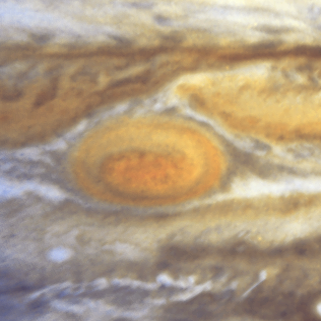

Jupiter's Great Red Spot

When 17th-century astronomers first turned their telescopes to Jupiter, they noted a conspicuous reddish spot on the giant planet. This Great Red Spot is still present in Jupiter's atmosphere, more than 300 years later. It is now known that it is a vast storm, spinning like a cyclone. Unlike a low-pressure hurricane in the Caribbean Sea, however, the Red Spot rotates in a counterclockwise direction in the southern hemisphere, showing that it is a high-pressure system. Winds inside this Jovian storm reach speeds of about 270 mph.

Credit: Hubble Heritage Team (STScI/AURA/NASA/ESA) and Amy Simon (Cornell U.)